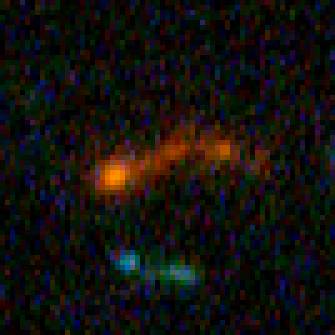

Hubble Building Blocks Galaxy at Redshift 5.42

Building block galaxy at redshift of 5.42 from Hubble Ultra Deep Field image.

Credit: NASA, ESA, and N. Pirzkal (European Space Agency/STScI)